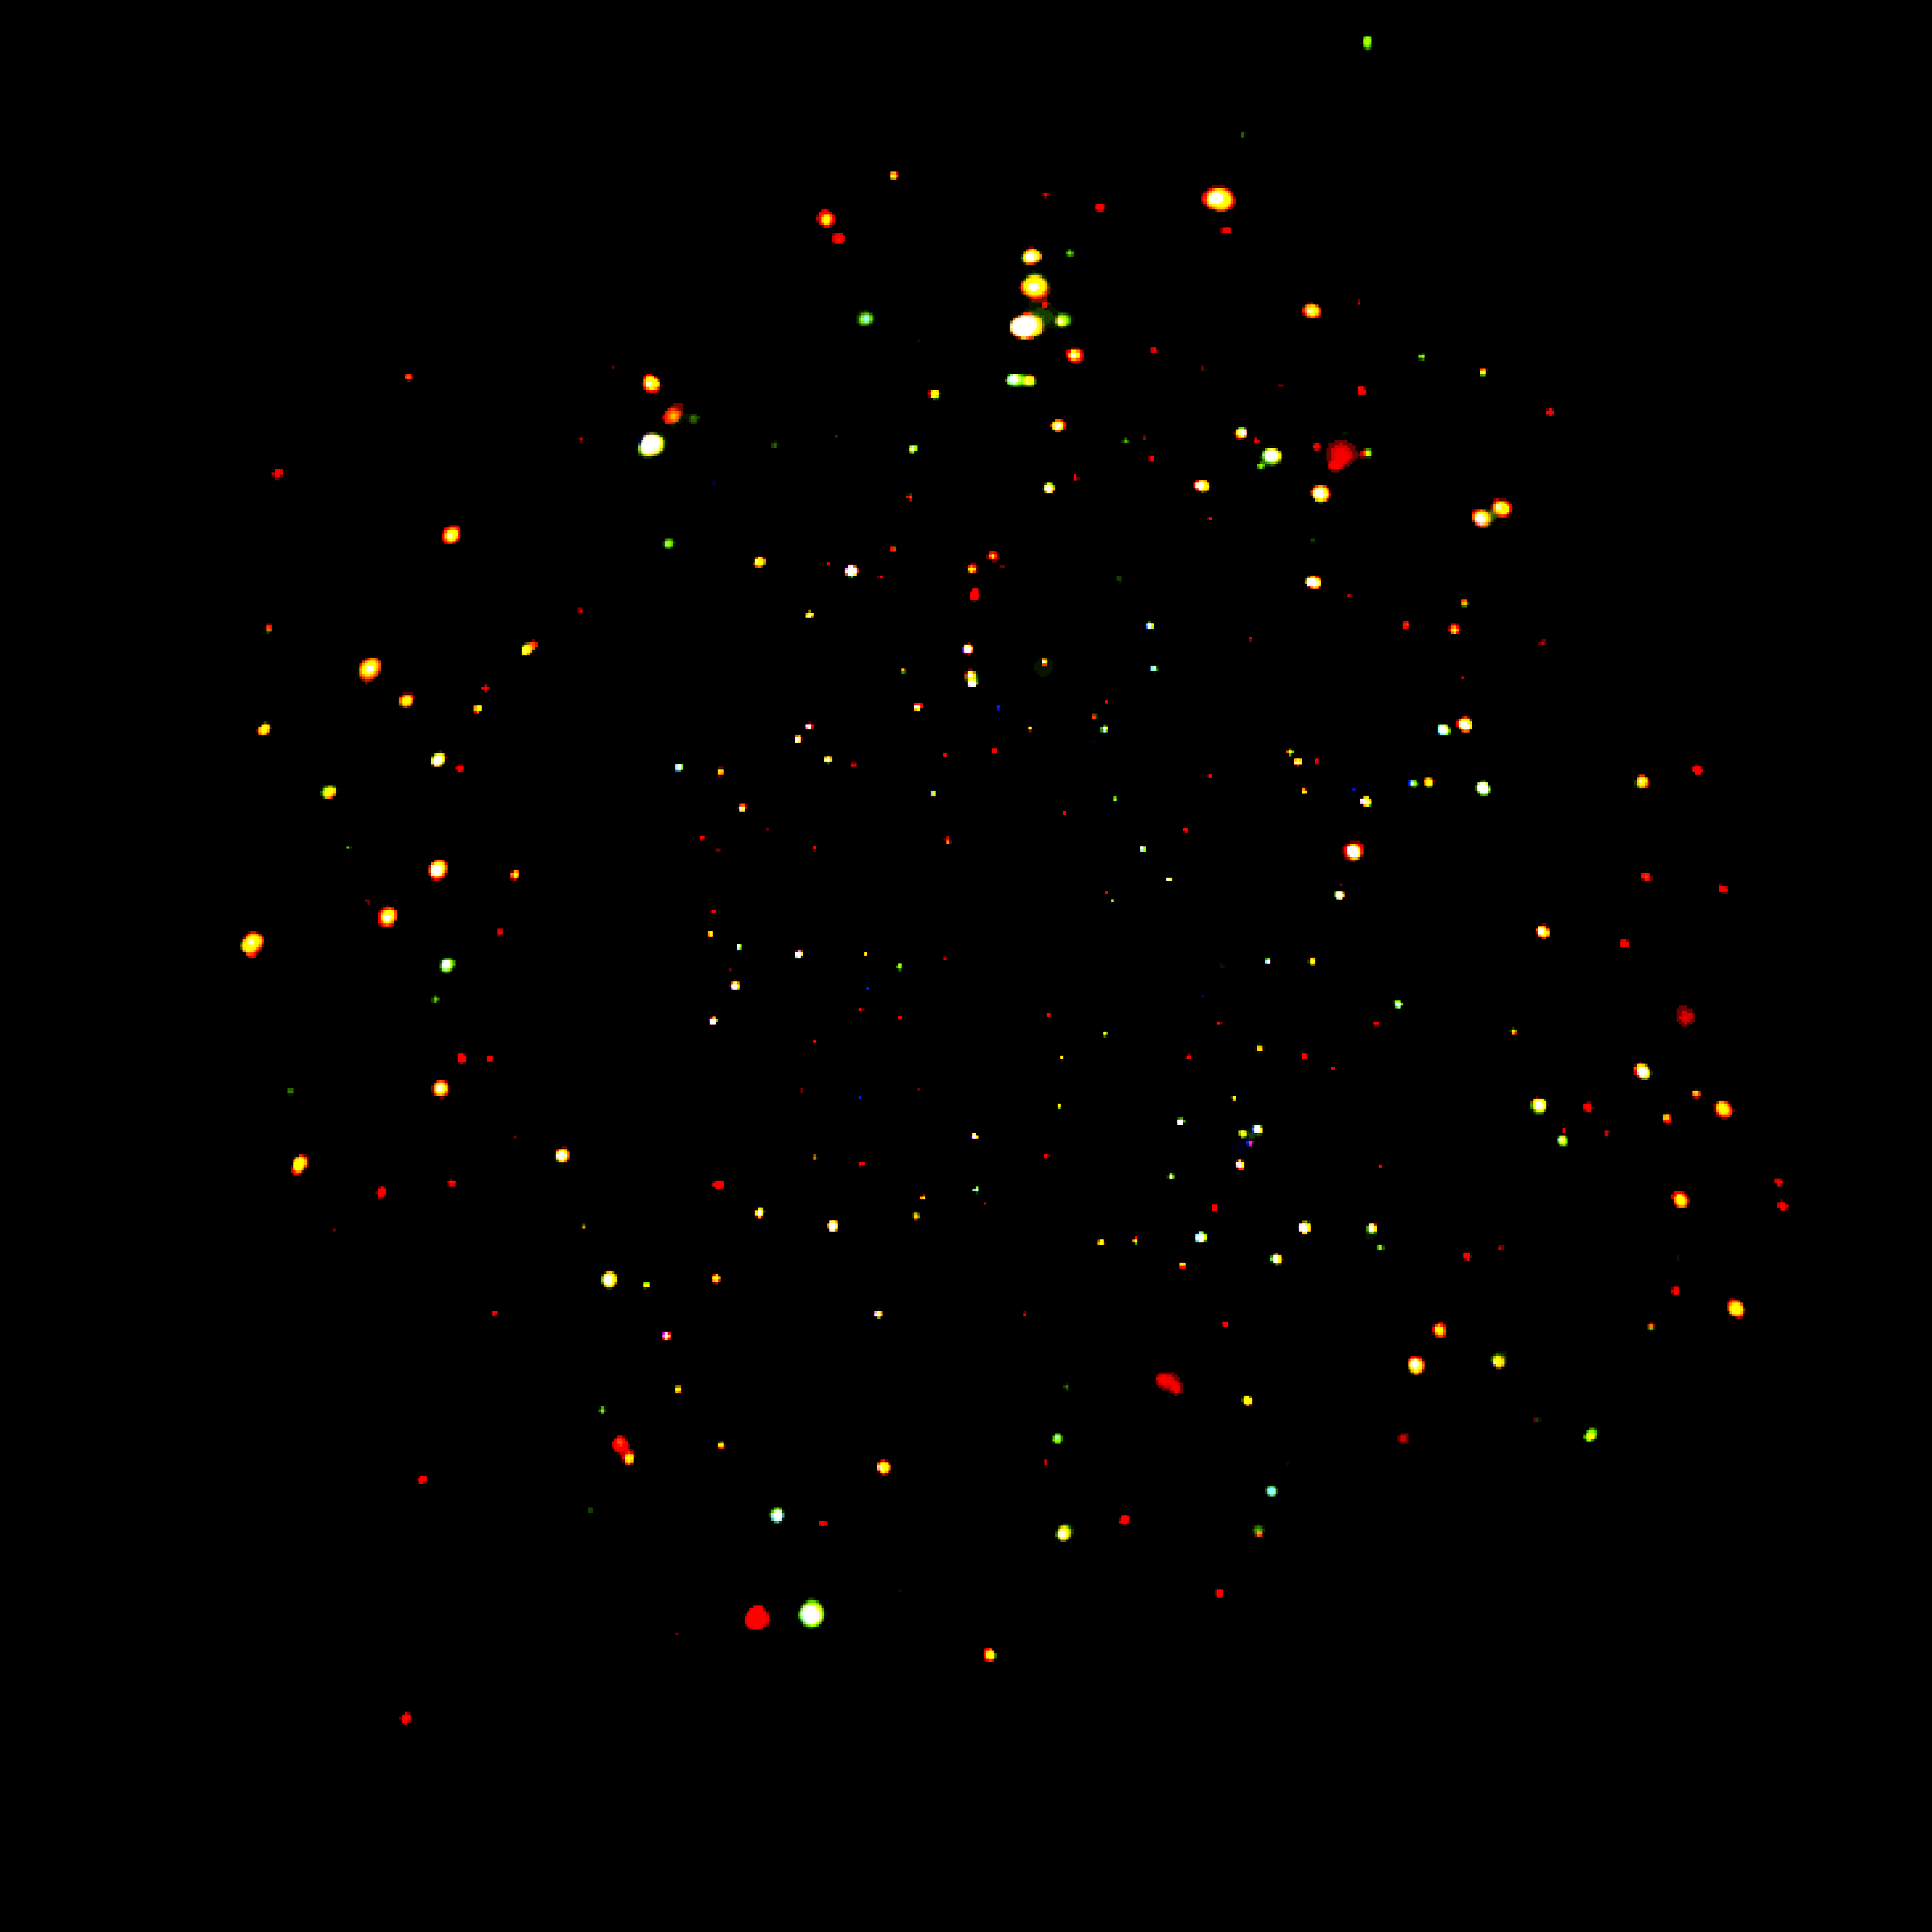

CDF-S CXO/ACIS Full Image

The Chandra Deep Field South.

Credit: NASA, ESA, the Chandra Deep Field-South Team